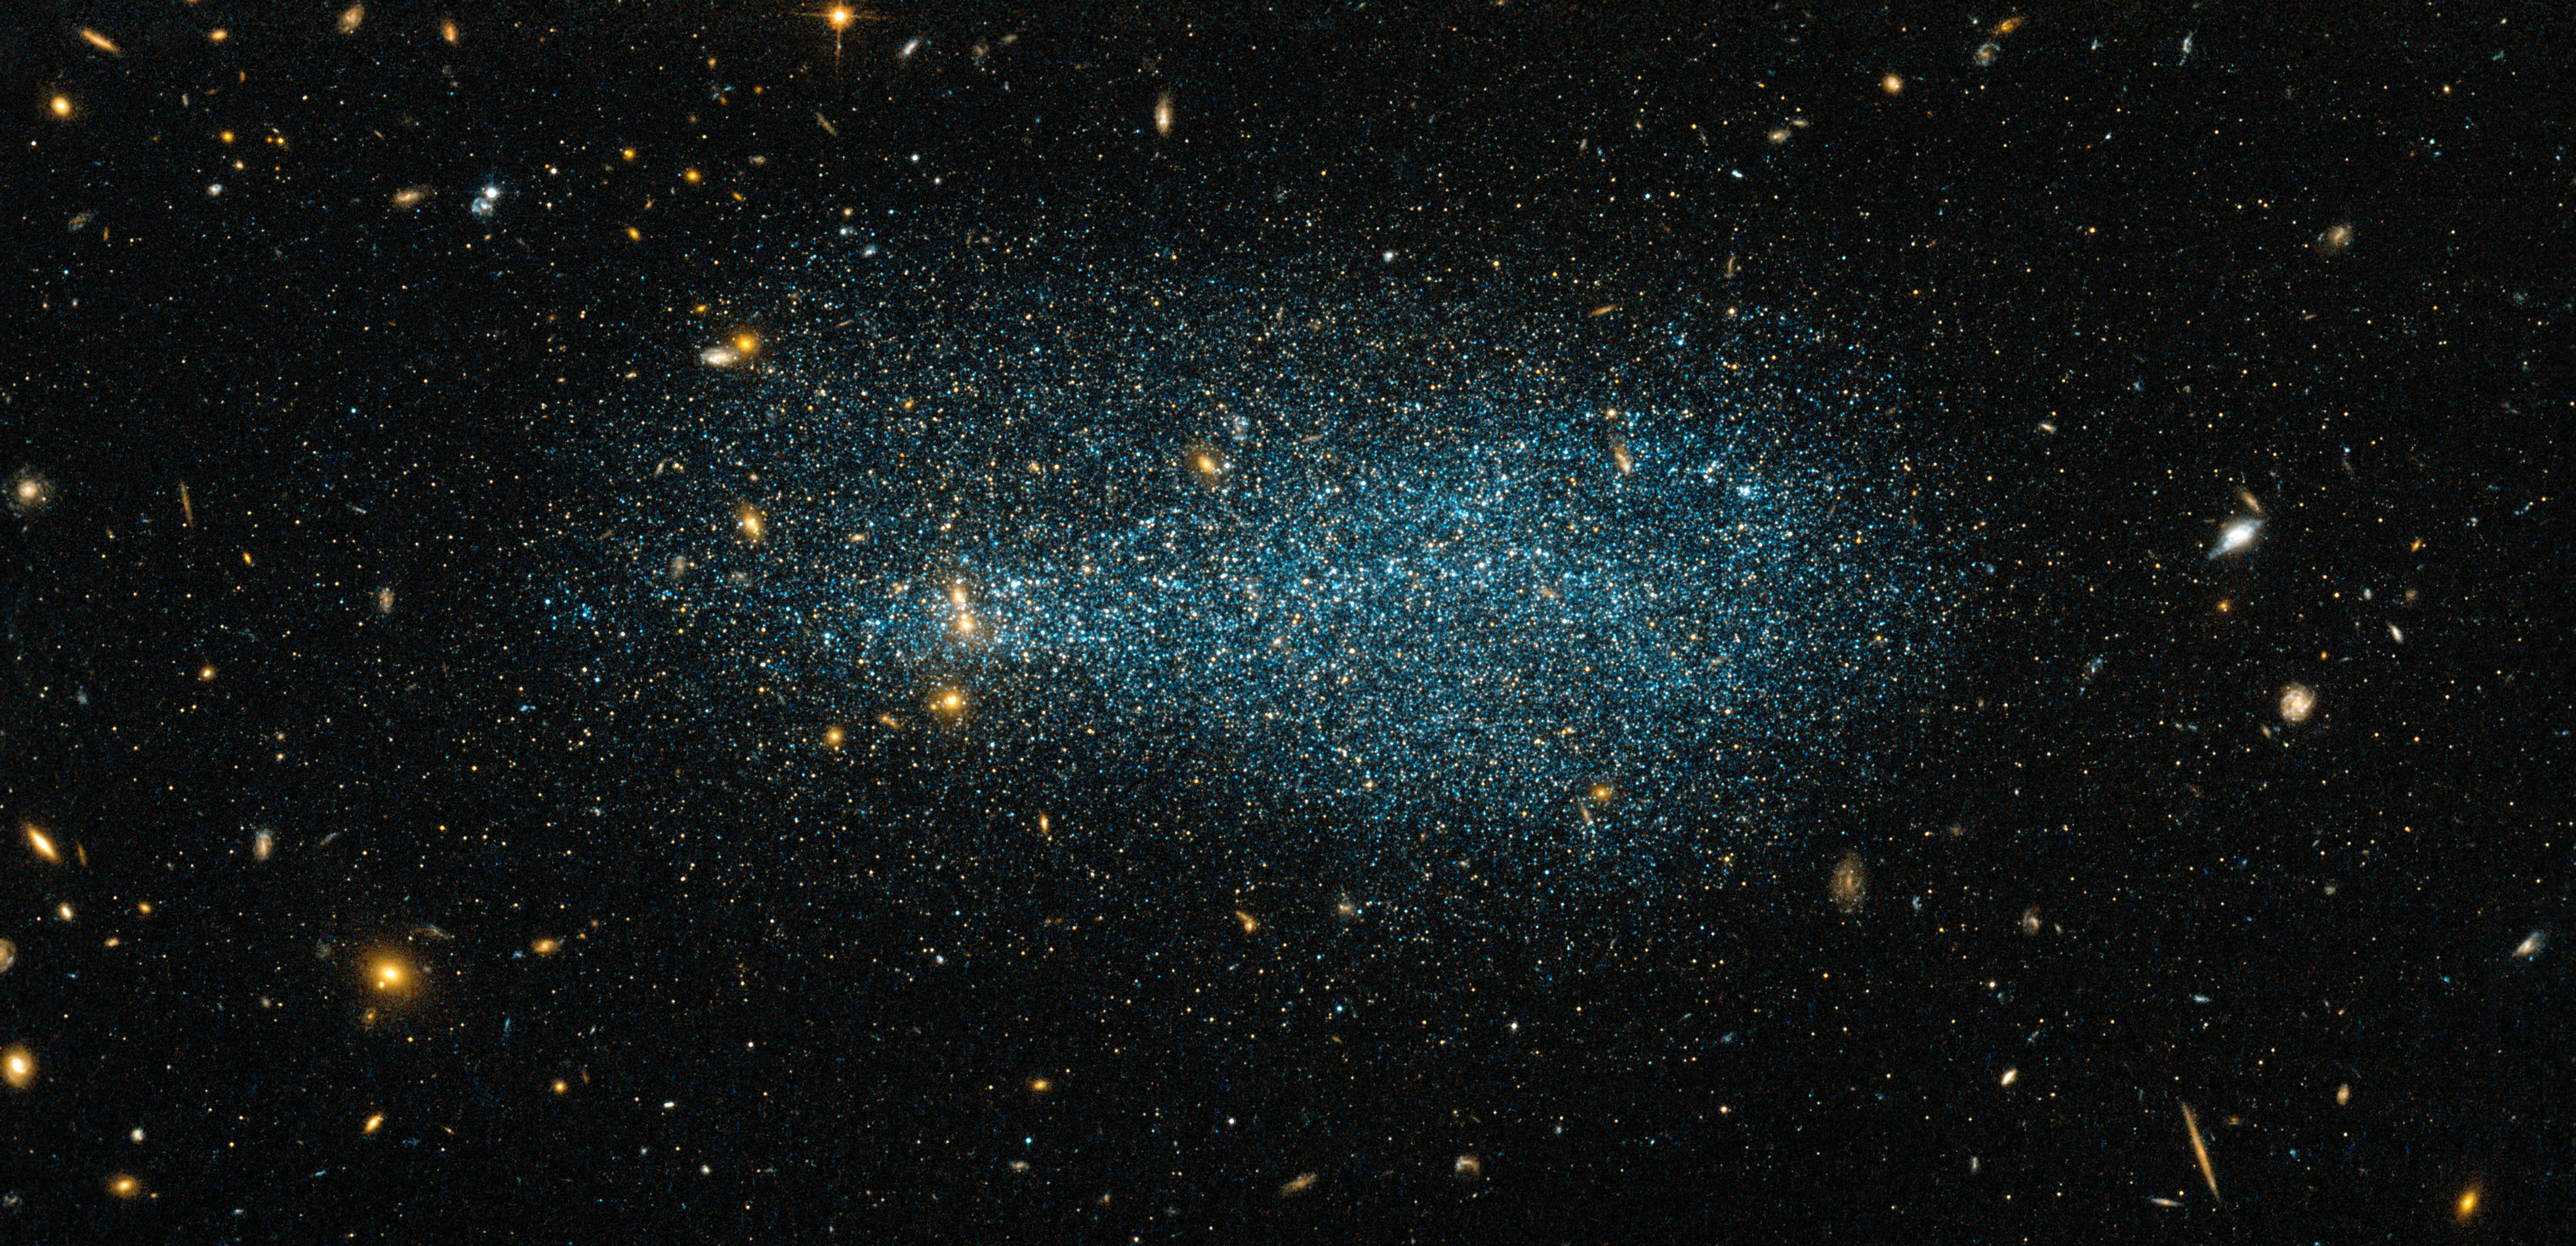

A flock of stars

The glittering specks in this image, resembling a distant flock of flying birds, are the stars that make up the dwarf galaxy ESO 540-31. Captured in this new image from the NASA/ESA Hubble Space Telescope, the dwarf galaxy lies just over 11 million light-years from Earth, in the constellation of Cetus (The Whale). The background of this image is full of many other galaxies, all located at vast distances from us.

Dwarf galaxies are the among the smaller and dimmer members of the galactic family, typically only containing around a few hundred million stars. Although this sounds like a large number, it is small when compared to spiral galaxies like our Milky Way, which are made up of hundreds of billions of stars.

A version of this image was entered into the Hubble’s Hidden Treasures image processing competition by contestant Luca Limatola.

Credit: ESA/Hubble & NASA Acknowledgement: Luca Limatola